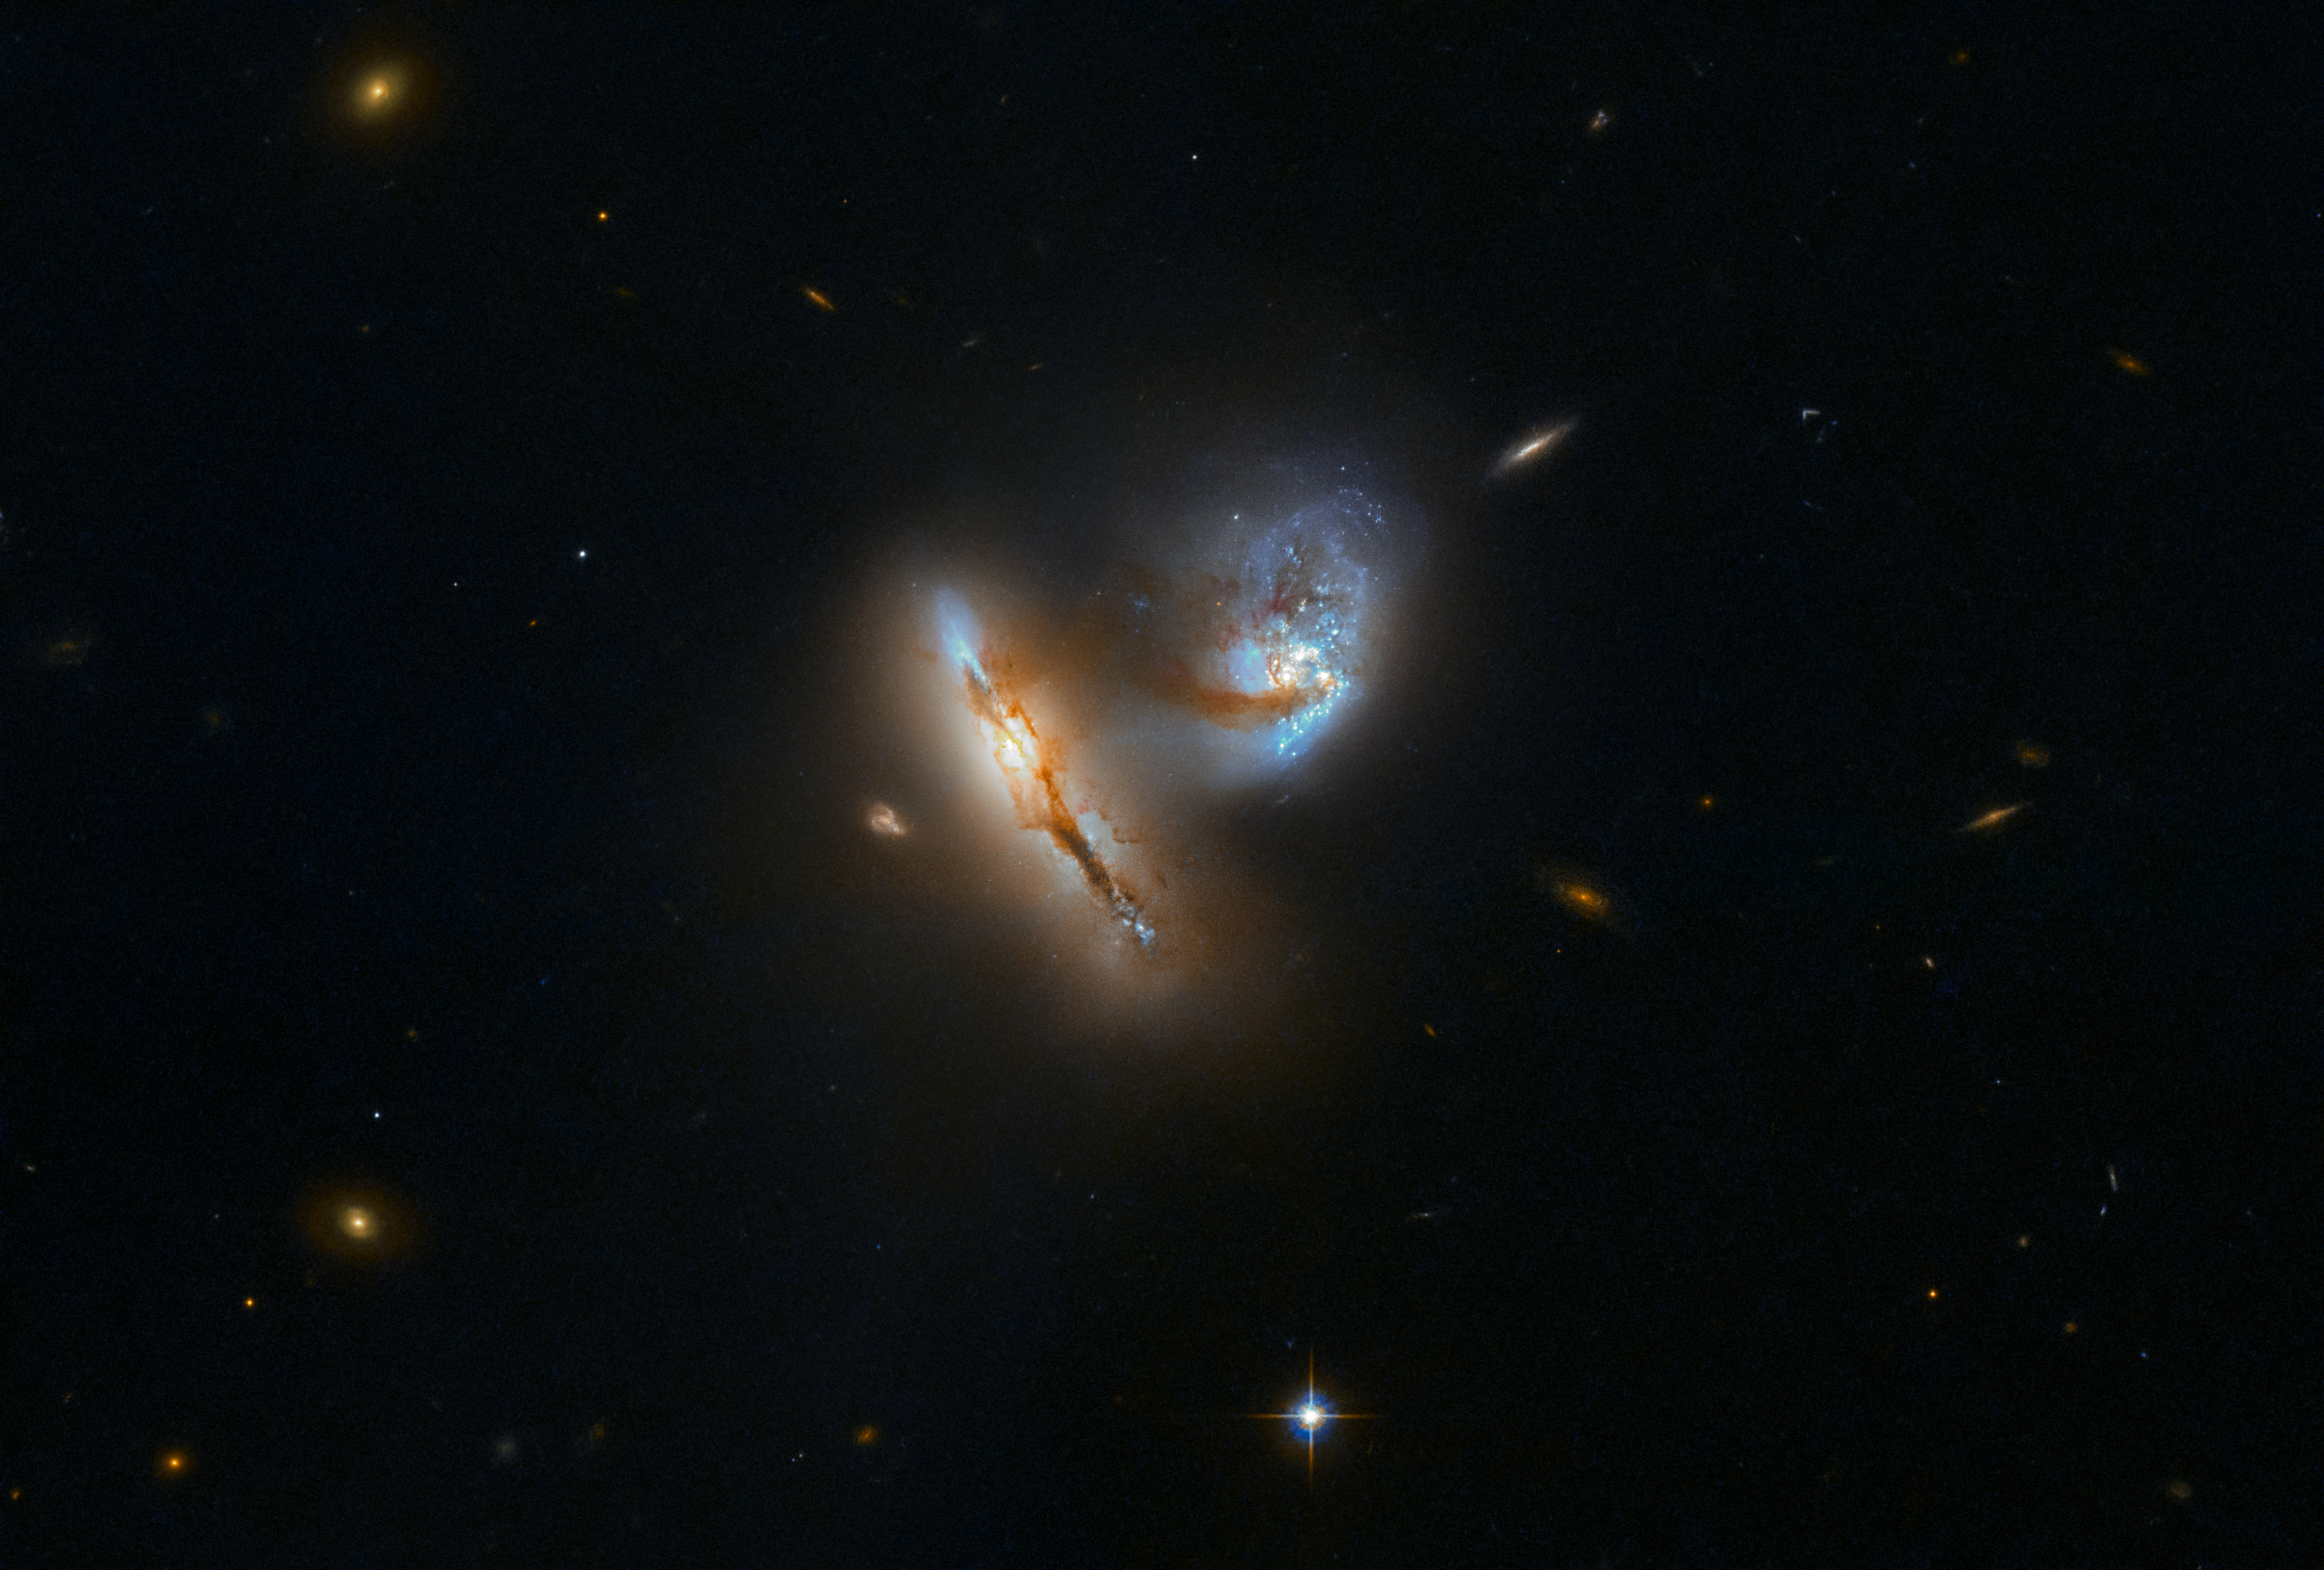

Galactic Creatures at Play

The pair of strange, luminescent creatures at play in this image are actually galaxies — realms of millions upon millions of stars.

This galactic duo is known as UGC 2369. The galaxies are interacting, meaning that their mutual gravitational attraction is pulling them closer and closer together and distorting their shapes in the process. A tenuous bridge of gas, dust, and stars can be seen connecting the two galaxies,, during which they pulled material out into space across the diminishing divide between them.

Interaction with others is a common event in the history of most galaxies. For larger galaxies like the Milky Way, the majority of these interactions involve significantly smaller so-called dwarf galaxies. But every few aeons, a more momentous event can occur. For our home galaxy, the next big event will take place in about four billion years, when it will collide with its bigger neighbour, the Andromeda Galaxy. Over time, the two galaxies will likely merge into one — already nicknamed Milkomeda.

Credit: ESA/Hubble & NASA, A. Evans